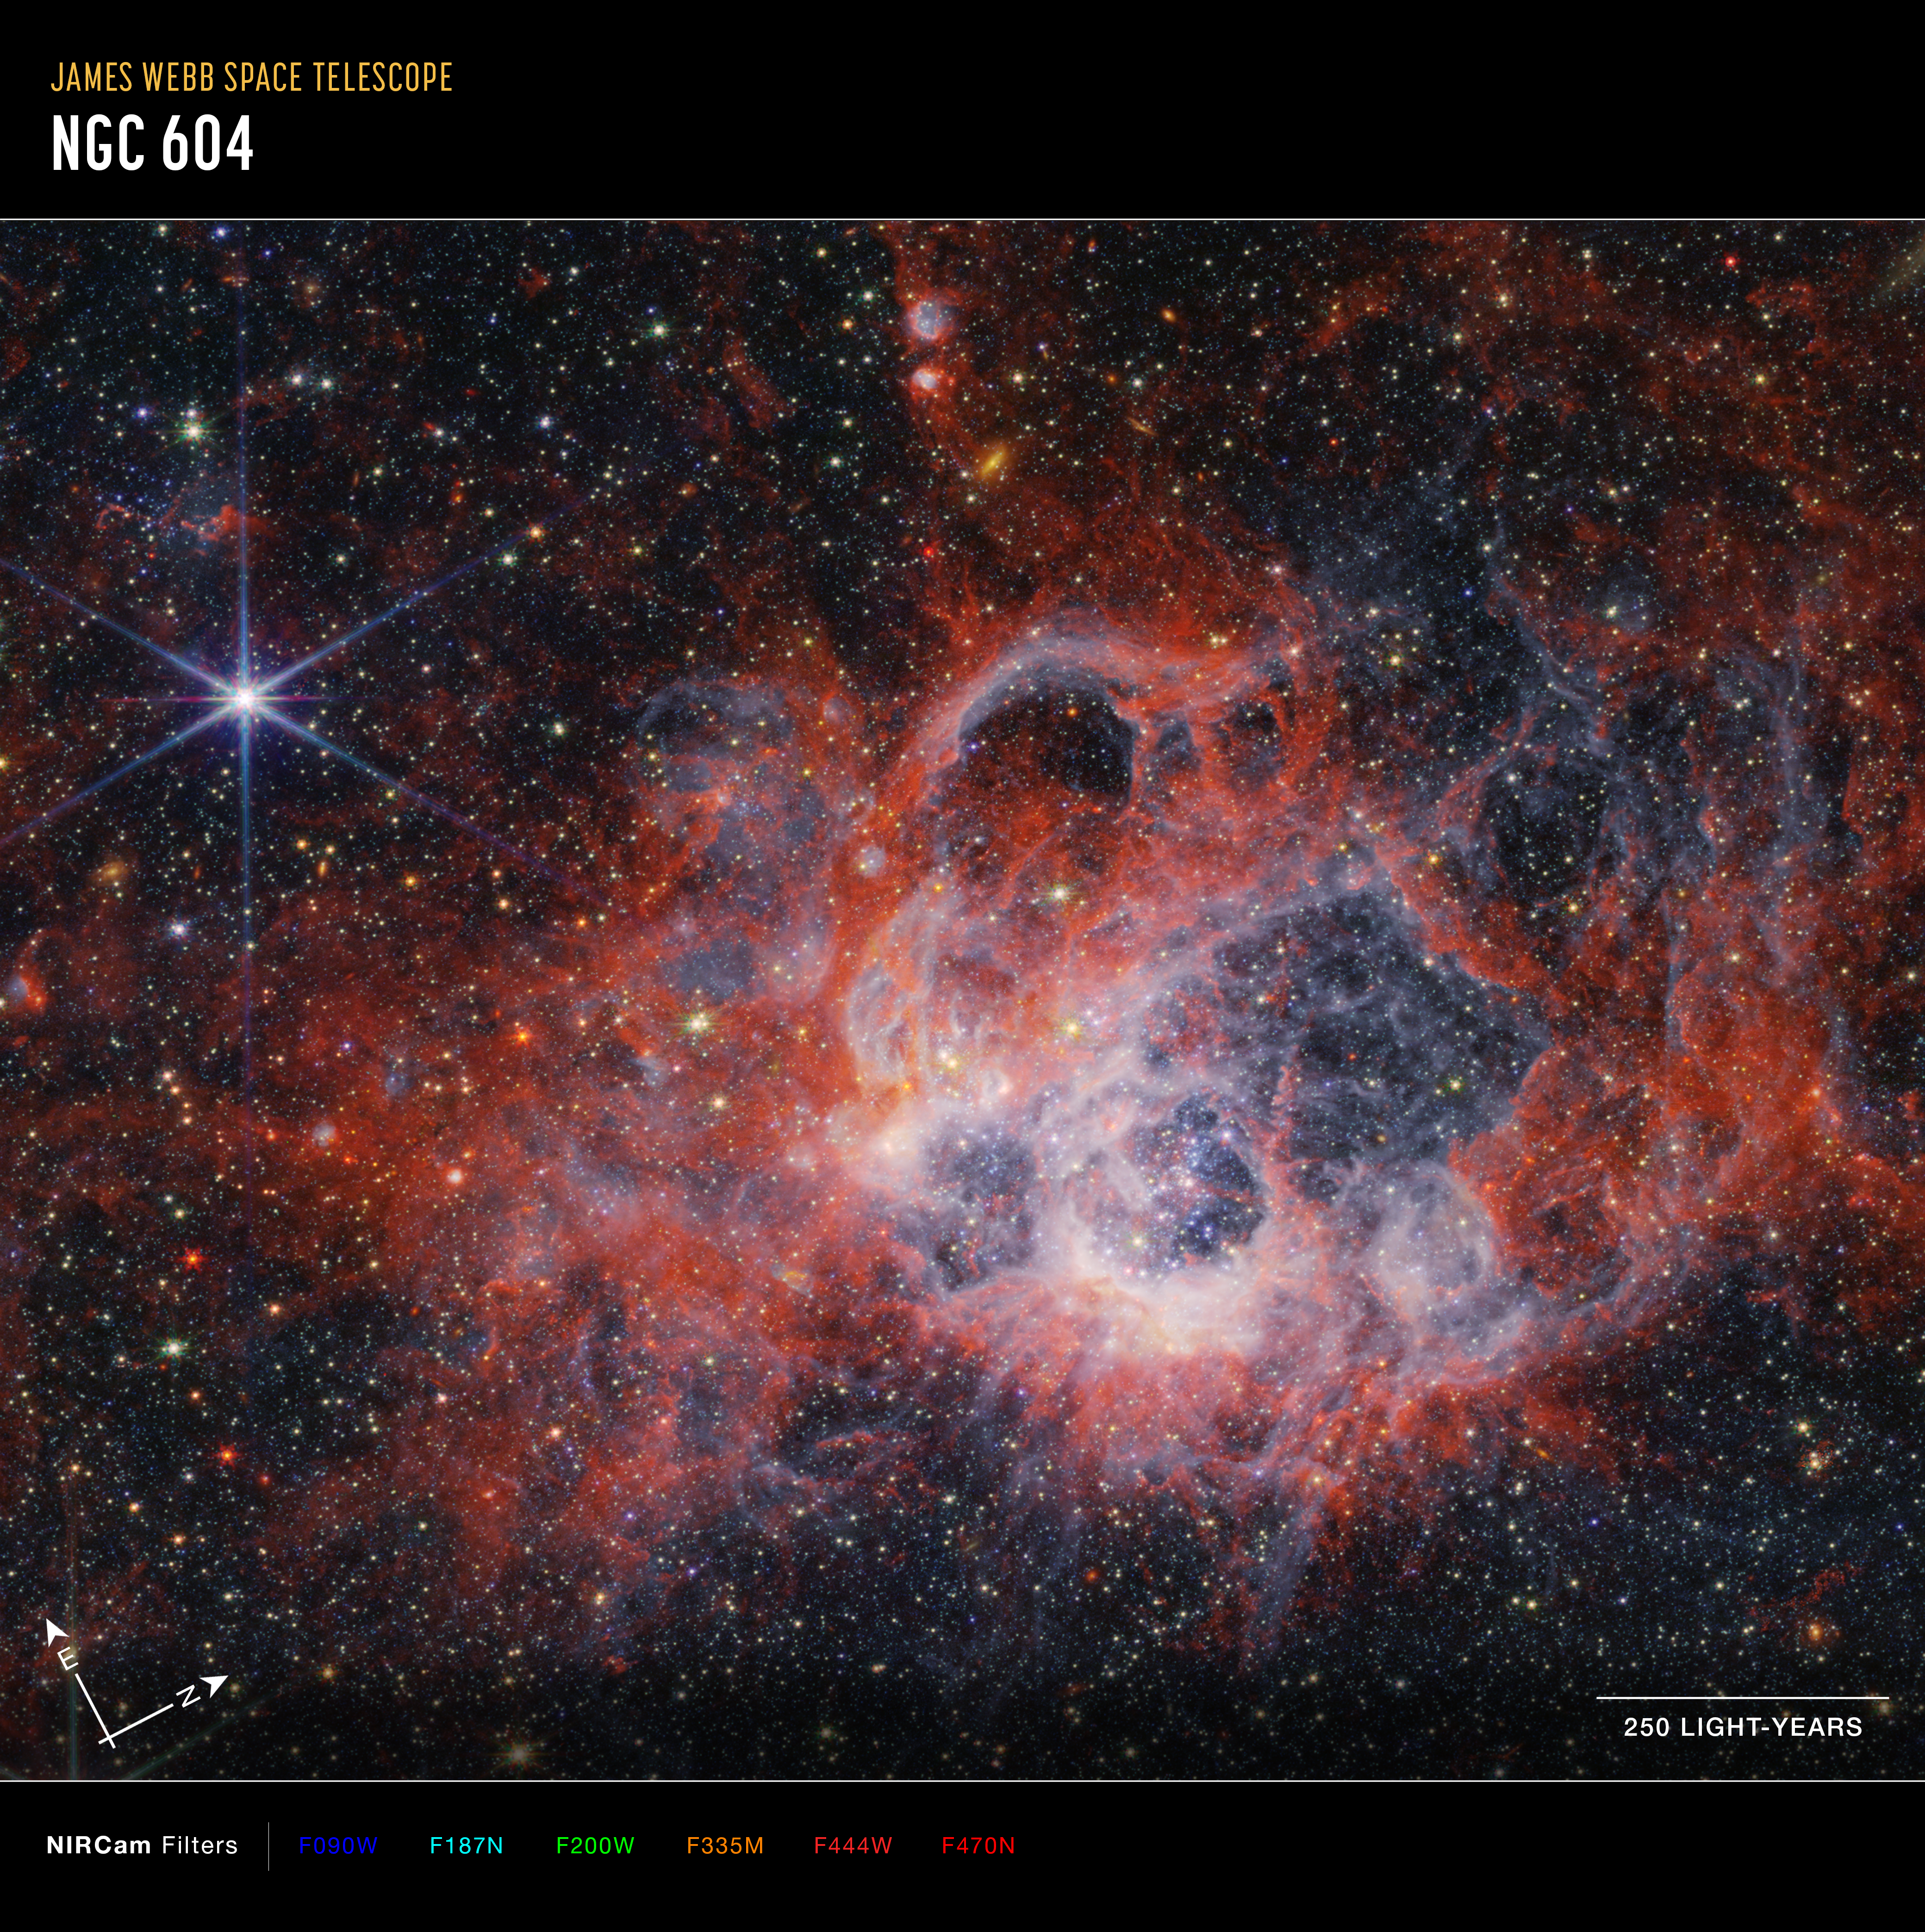

NGC 604 (NIRCam image, annotated)

This image from the NASA/ESA/CSA James Webb Space Telescope’s NIRCam (Near-Infrared Camera) of star-forming region NGC 604 shows how stellar winds from bright, hot young stars carve out cavities in surrounding gas and dust.

The bright orange streaks in this image signify the presence of carbon-based molecules known as polycyclic aromatic hydrocarbons, or PAHs. As you travel further from the immediate cavities of dust where the star is forming, the deeper red signifies molecular hydrogen. This cooler gas is a prime environment for star formation. Ionised hydrogen from ultraviolet radiation appears as a white and blue ghostly glow.

NGC 604 is located in the Triangulum Galaxy (M33), 2.73 million light-years away from Earth. It provides an opportunity for astronomers to study a high concentration of very young, massive stars in a nearby region.

Credit: NASA, ESA, CSA, STScI